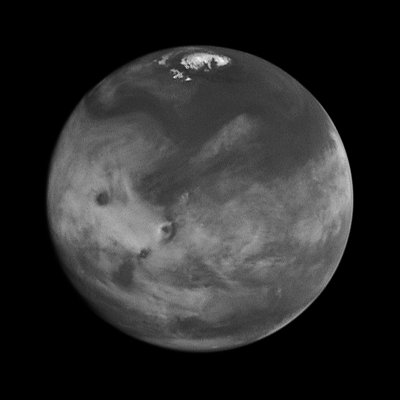

Comparison View of Mars Cloud Cover

The right image, in blue light only, brings out details in the cloud structure and is remarkably similar to weather satellite pictures taken of Earth.

Credit: Phil James (Univ. Toledo), Todd Clancy (Space Science Inst., Boulder, CO), Steve Lee (Univ. Colorado), and NASA/ESA